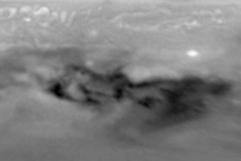

Evolution of D/G Impact Sites on Jupiter

The structure seen in earlier views has disappeared rapidly in the images taken on 30 July and 24 August, respectively. Almost all of the changes between the images are due to Jupiter's east-west winds that play a key role in the dispersing of the dark material.

Credit: H. Hammel, MIT and NASA/ESA